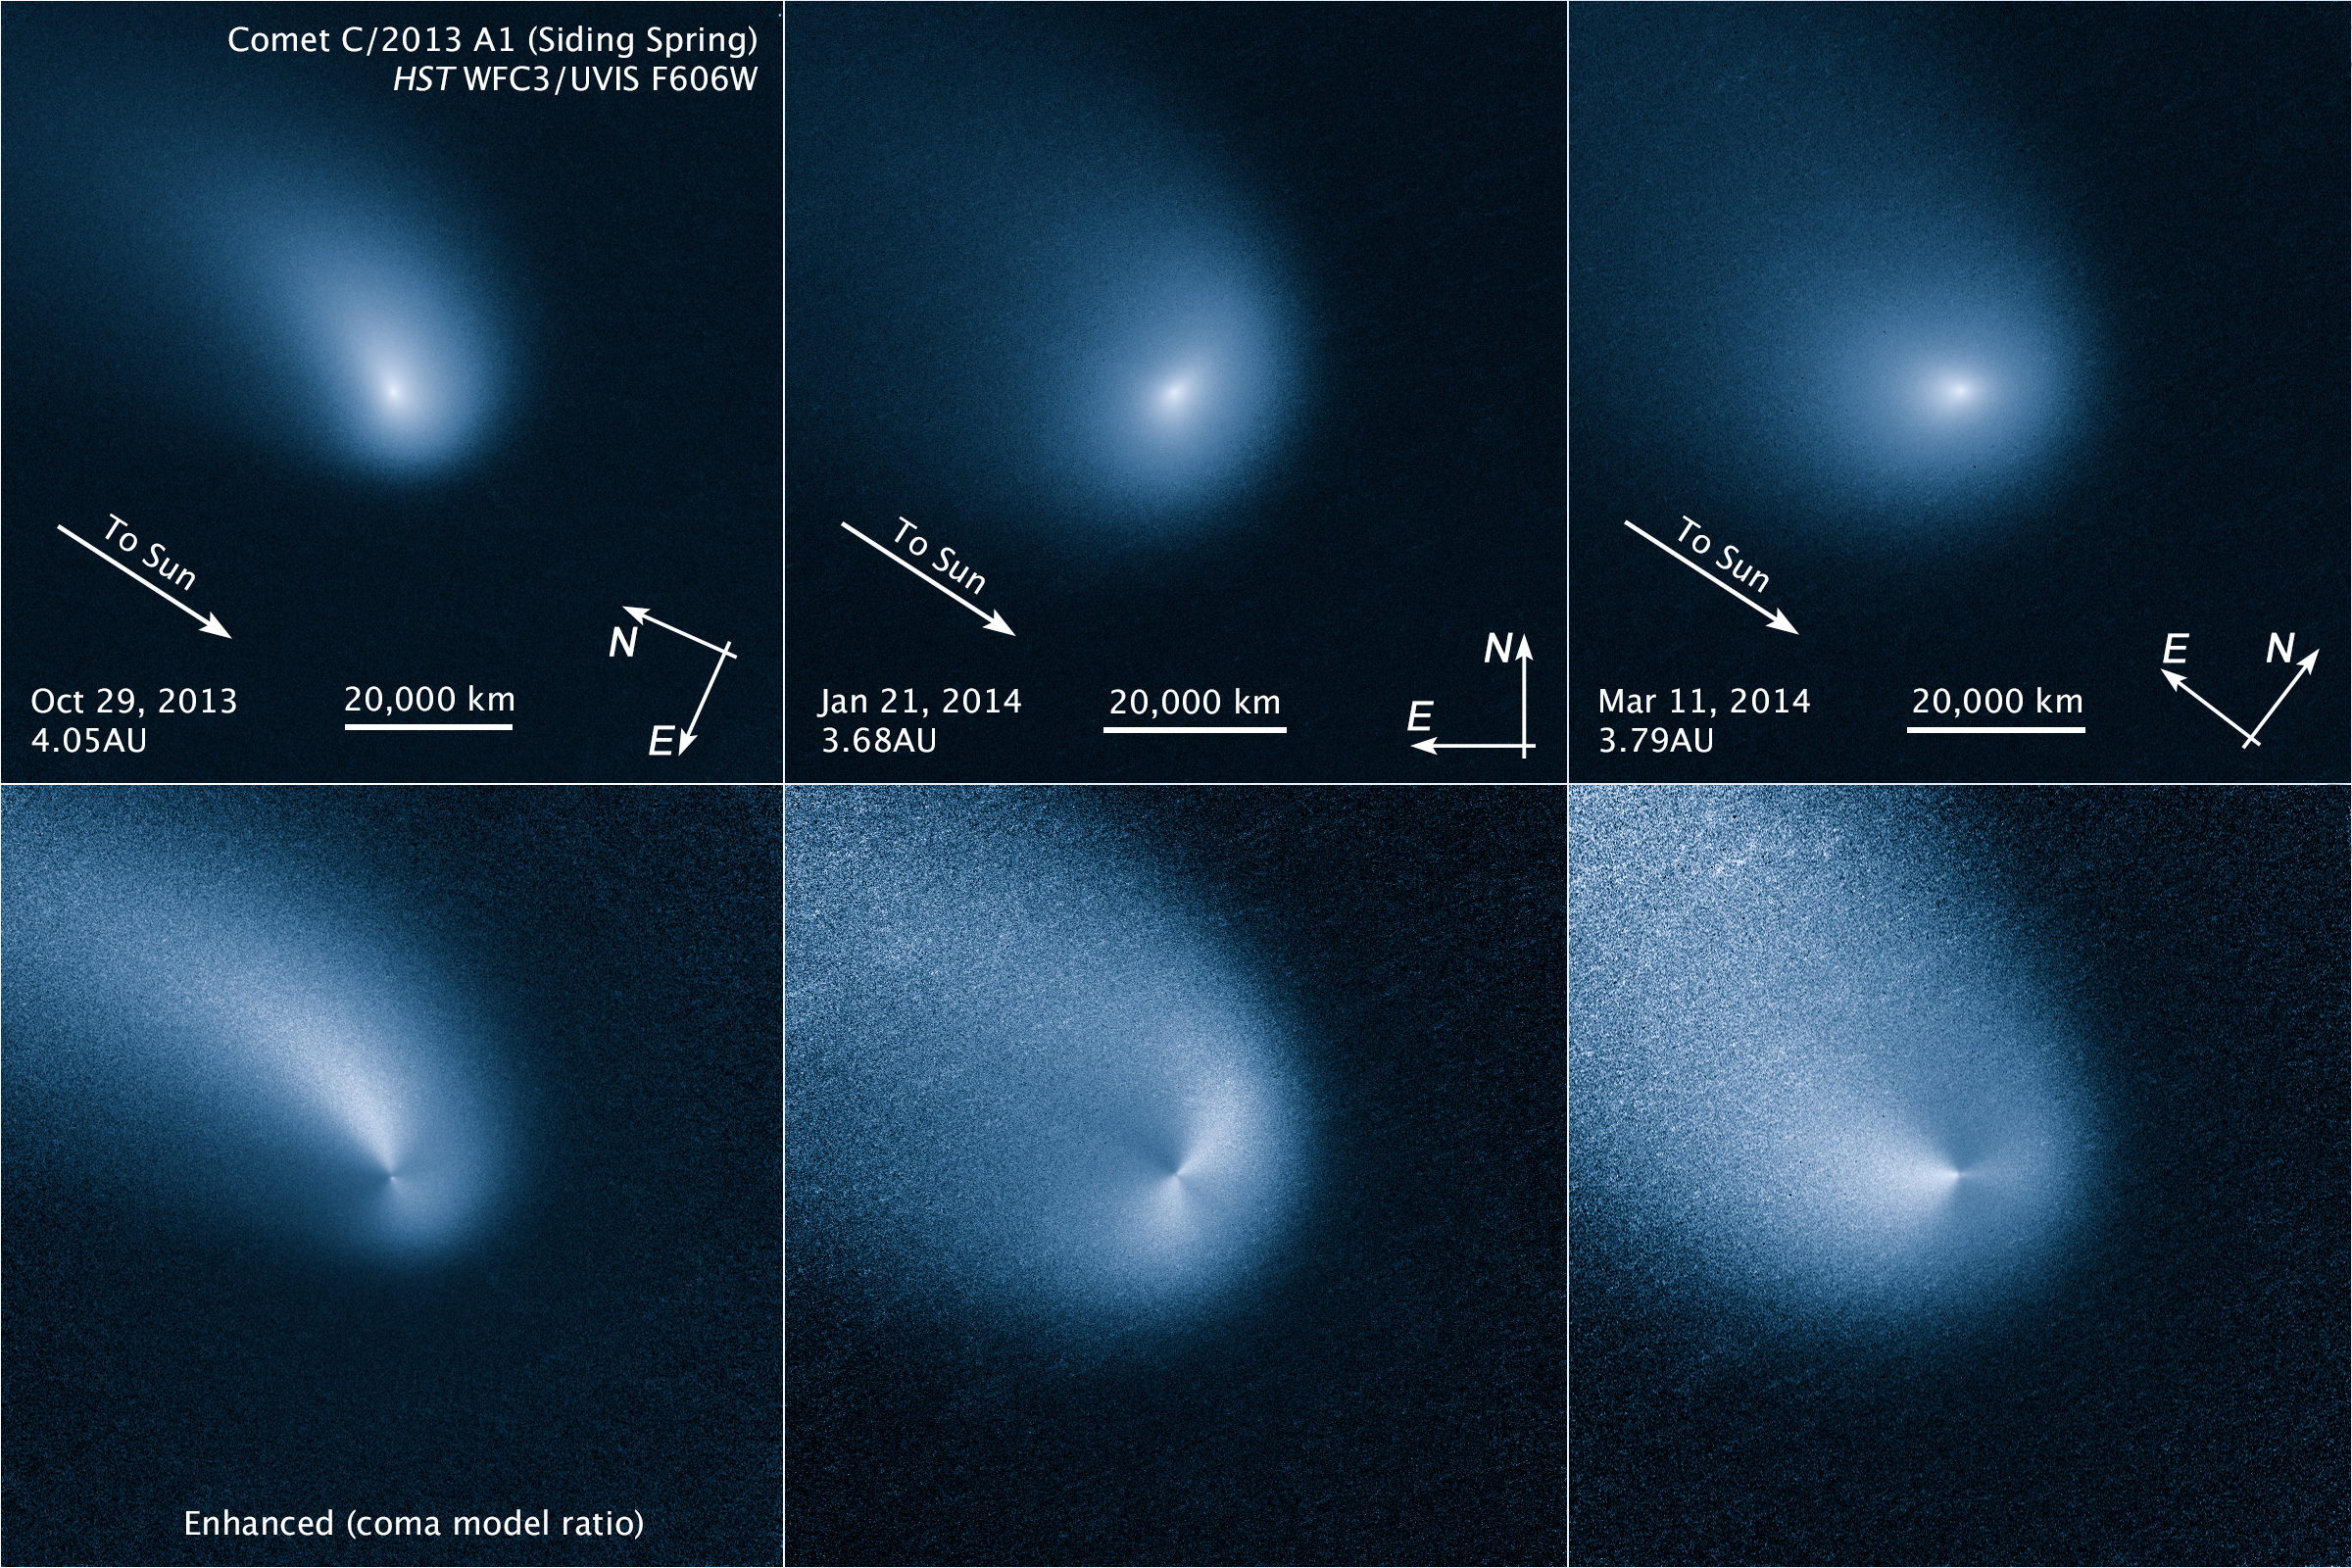

Comet Siding Spring comparison of enhanced and original images

This is a comparison between the enhanced (below) and original (above) set of images of Comet Siding Spring. The three images (left to right) were taken by the NASA/ESA Hubble Space Telescope at three month intervals.

Comet Siding Spring is plunging toward the Sun along a roughly 1-million-year orbit. The comet, discovered in 2013, was within the radius of Jupiter's orbit when the Hubble Space Telescope photographed it on March 11, 2014.

Hubble resolves two jets of dust coming from the solid icy nucleus. These persistent jets were first seen in Hubble pictures taken on Oct. 29, 2013. The feature should allow astronomers to measure the direction of the nucleus's pole, and hence, rotation axis.

The comet will make its closest approach to our Sun on Oct. 25, 2014, at a distance of 130 million miles, well outside Earth's orbit. On its inbound leg, Comet Siding Spring will pass within 84,000 miles of Mars on Oct. 19, 2014, which is less than half the Moon's distance from Earth. The comet is not expected to become bright enough to be seen with the naked eye.

Credit: NASA, ESA, and J.-Y. Li (Planetary Science Institute)